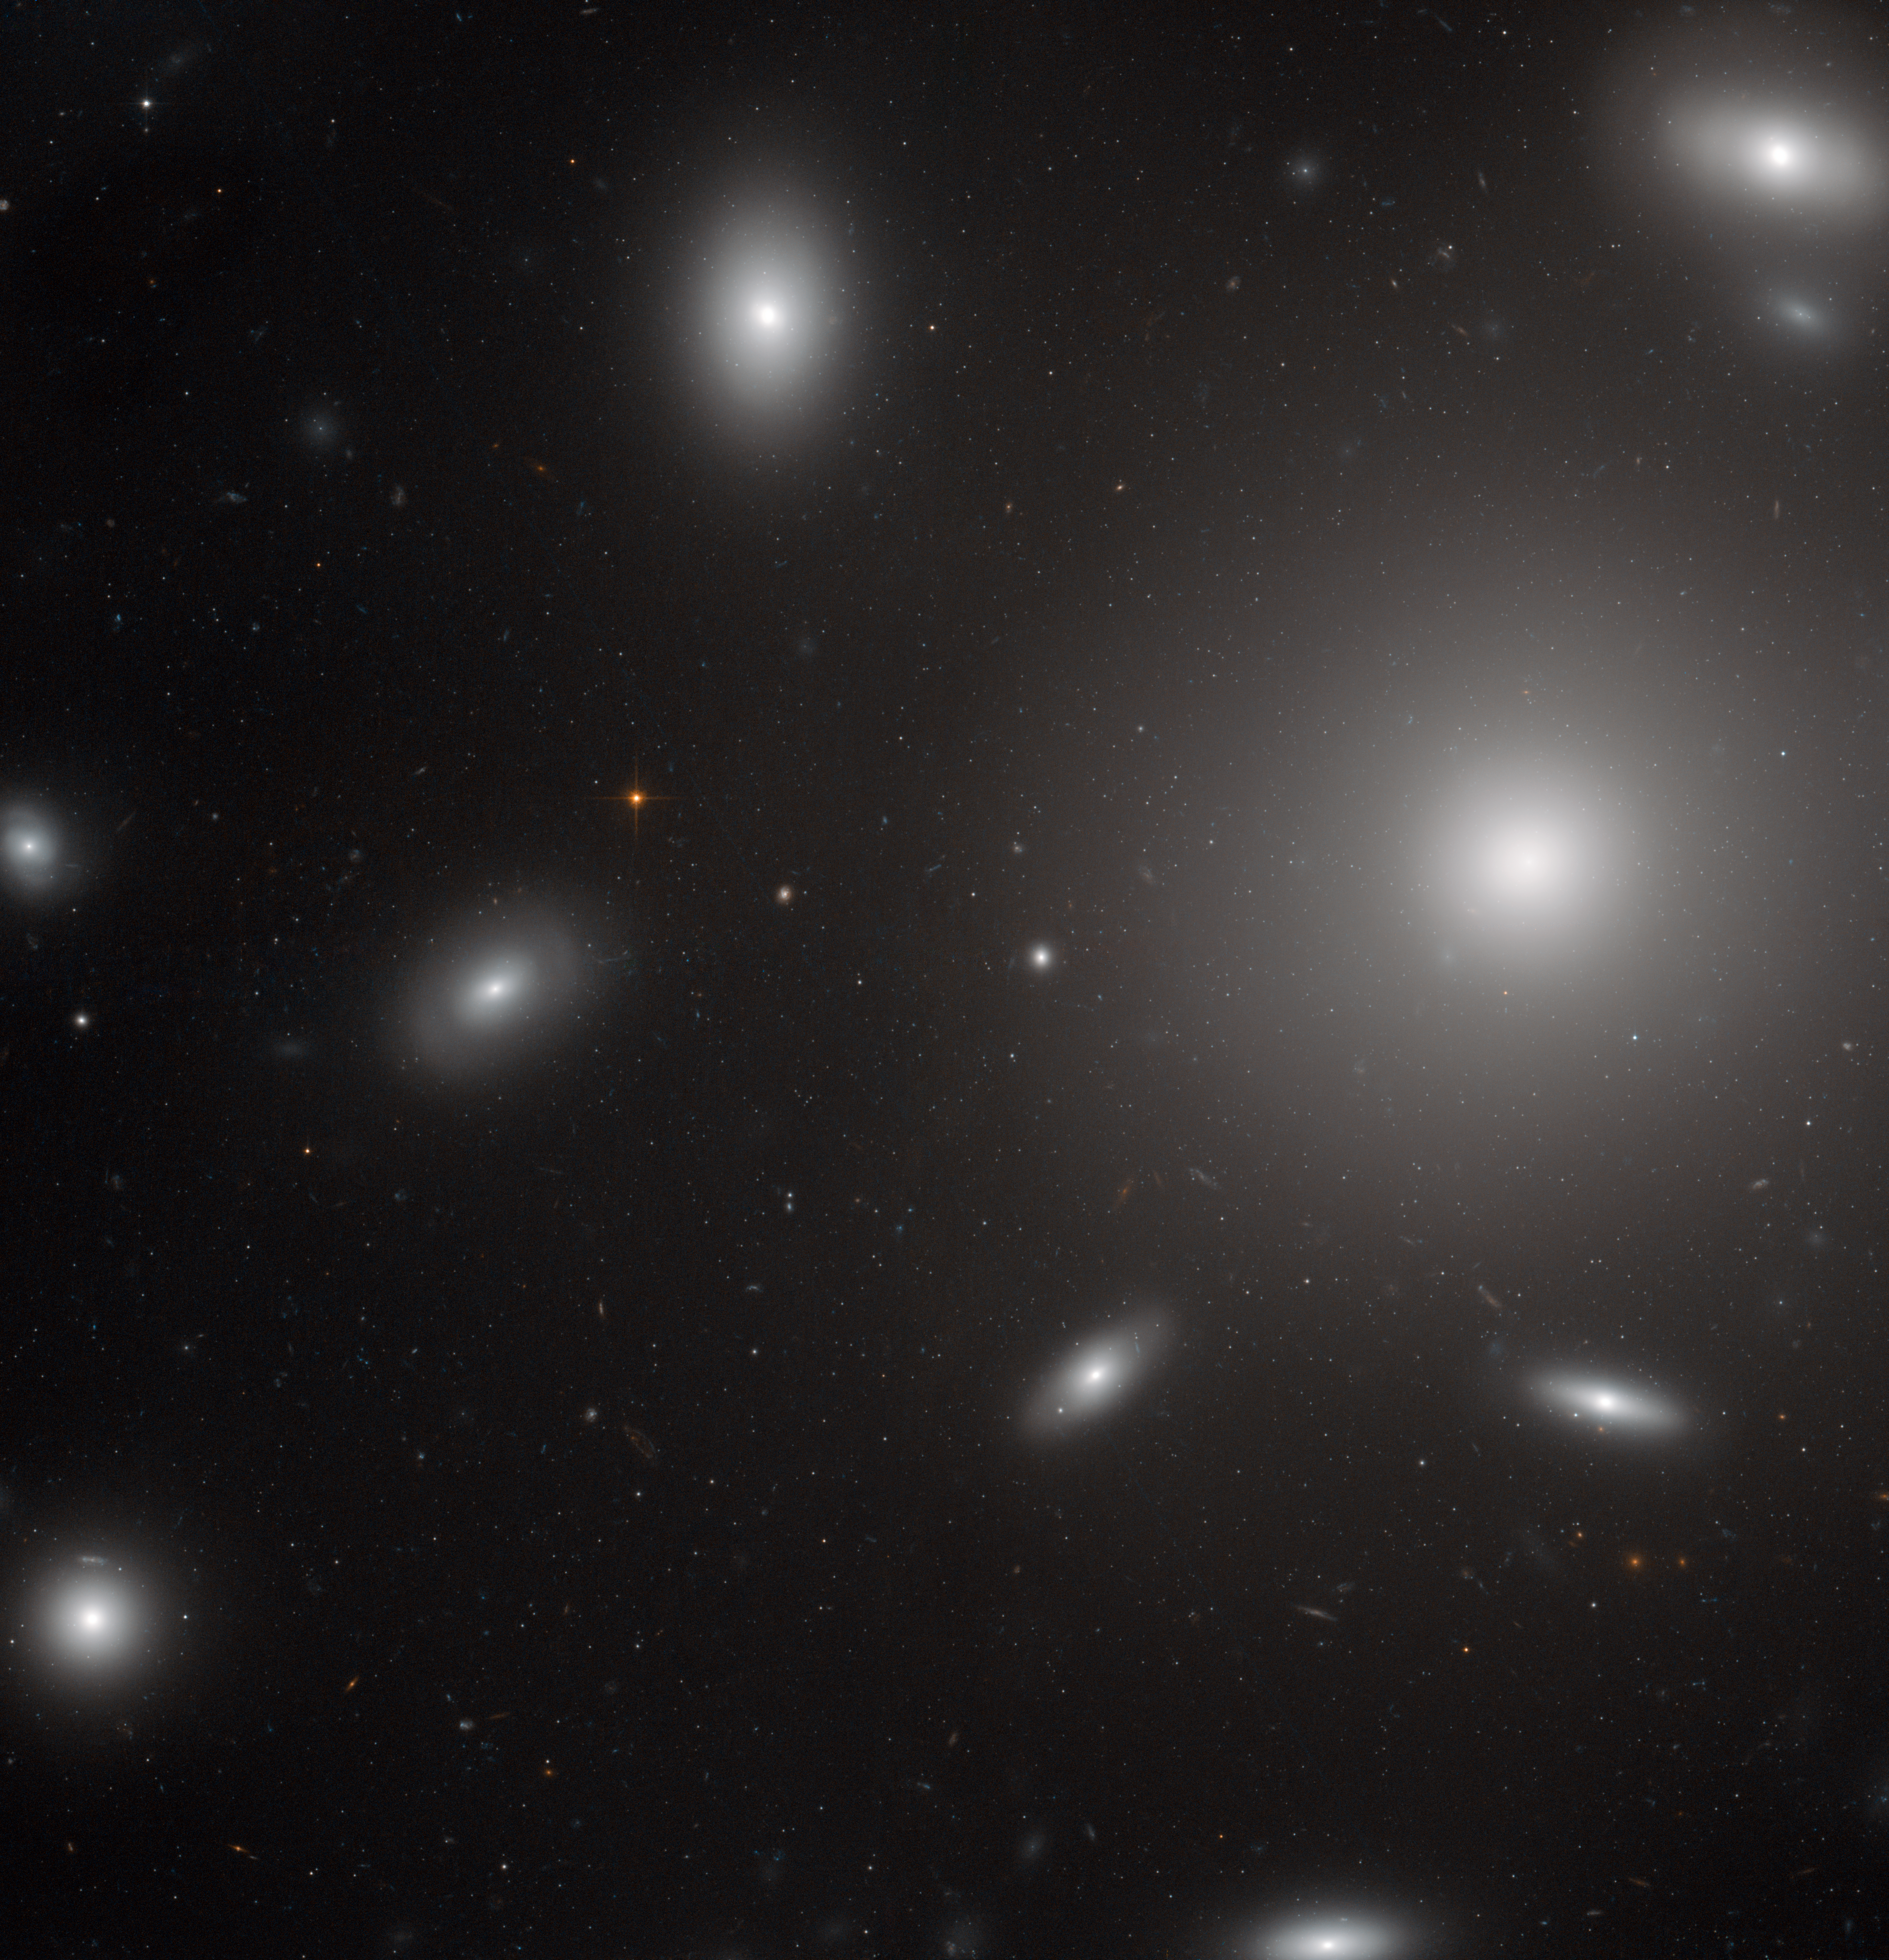

Galaxies in a swarm of star clusters

In this NASA/ESA Hubble Space Telescope image, NGC 4874 is the brightest object, located to the right of the frame and seen as a bright star-like core surrounded by a hazy halo. A few of the other galaxies of the cluster are also visible, looking like flying saucers dancing around NGC 4874. But the really remarkable feature of this image is the point-like objects around NGC 4874, revealed on a closer look: almost all of them are clusters of stars that belong to the galaxy. Each of these globular star clusters contains many hundreds of thousands of stars.

Recently, astronomers discovered that a few of these point-like objects are not star clusters but ultra-compact dwarf galaxies, also under the gravitational influence of NGC 4874. Being only about 200 light-years across and mostly made up of old stars, these galaxies resemble brighter and larger versions of globular clusters. They are thought to be the cores of small elliptical galaxies that, due to the violent interactions with other galaxies in the cluster, lost their gas and surrounding stars.

This Hubble image also shows many more distant galaxies that do not belong to the cluster, seen as small smudges in the background. While the galaxies in the Coma Cluster are located about 350 million light-years away, these other objects are much further out. Their light took several hundred million to billions of years to reach us.

Most unusually, the image also shows a very faint blue satellite trail, extending across the whole image, from the upper left corner of the frame to the lower right. Because Hubble’s cameras can only see a tiny part of the sky at one time, such trails are very rare.

This picture was created from optical and near-infrared exposures taken with the Wide Field Channel of Hubble’s Advanced Camera for Surveys. The field of view is 3.3 arcminutes across.

Credit: ESA/Hubble & NASA